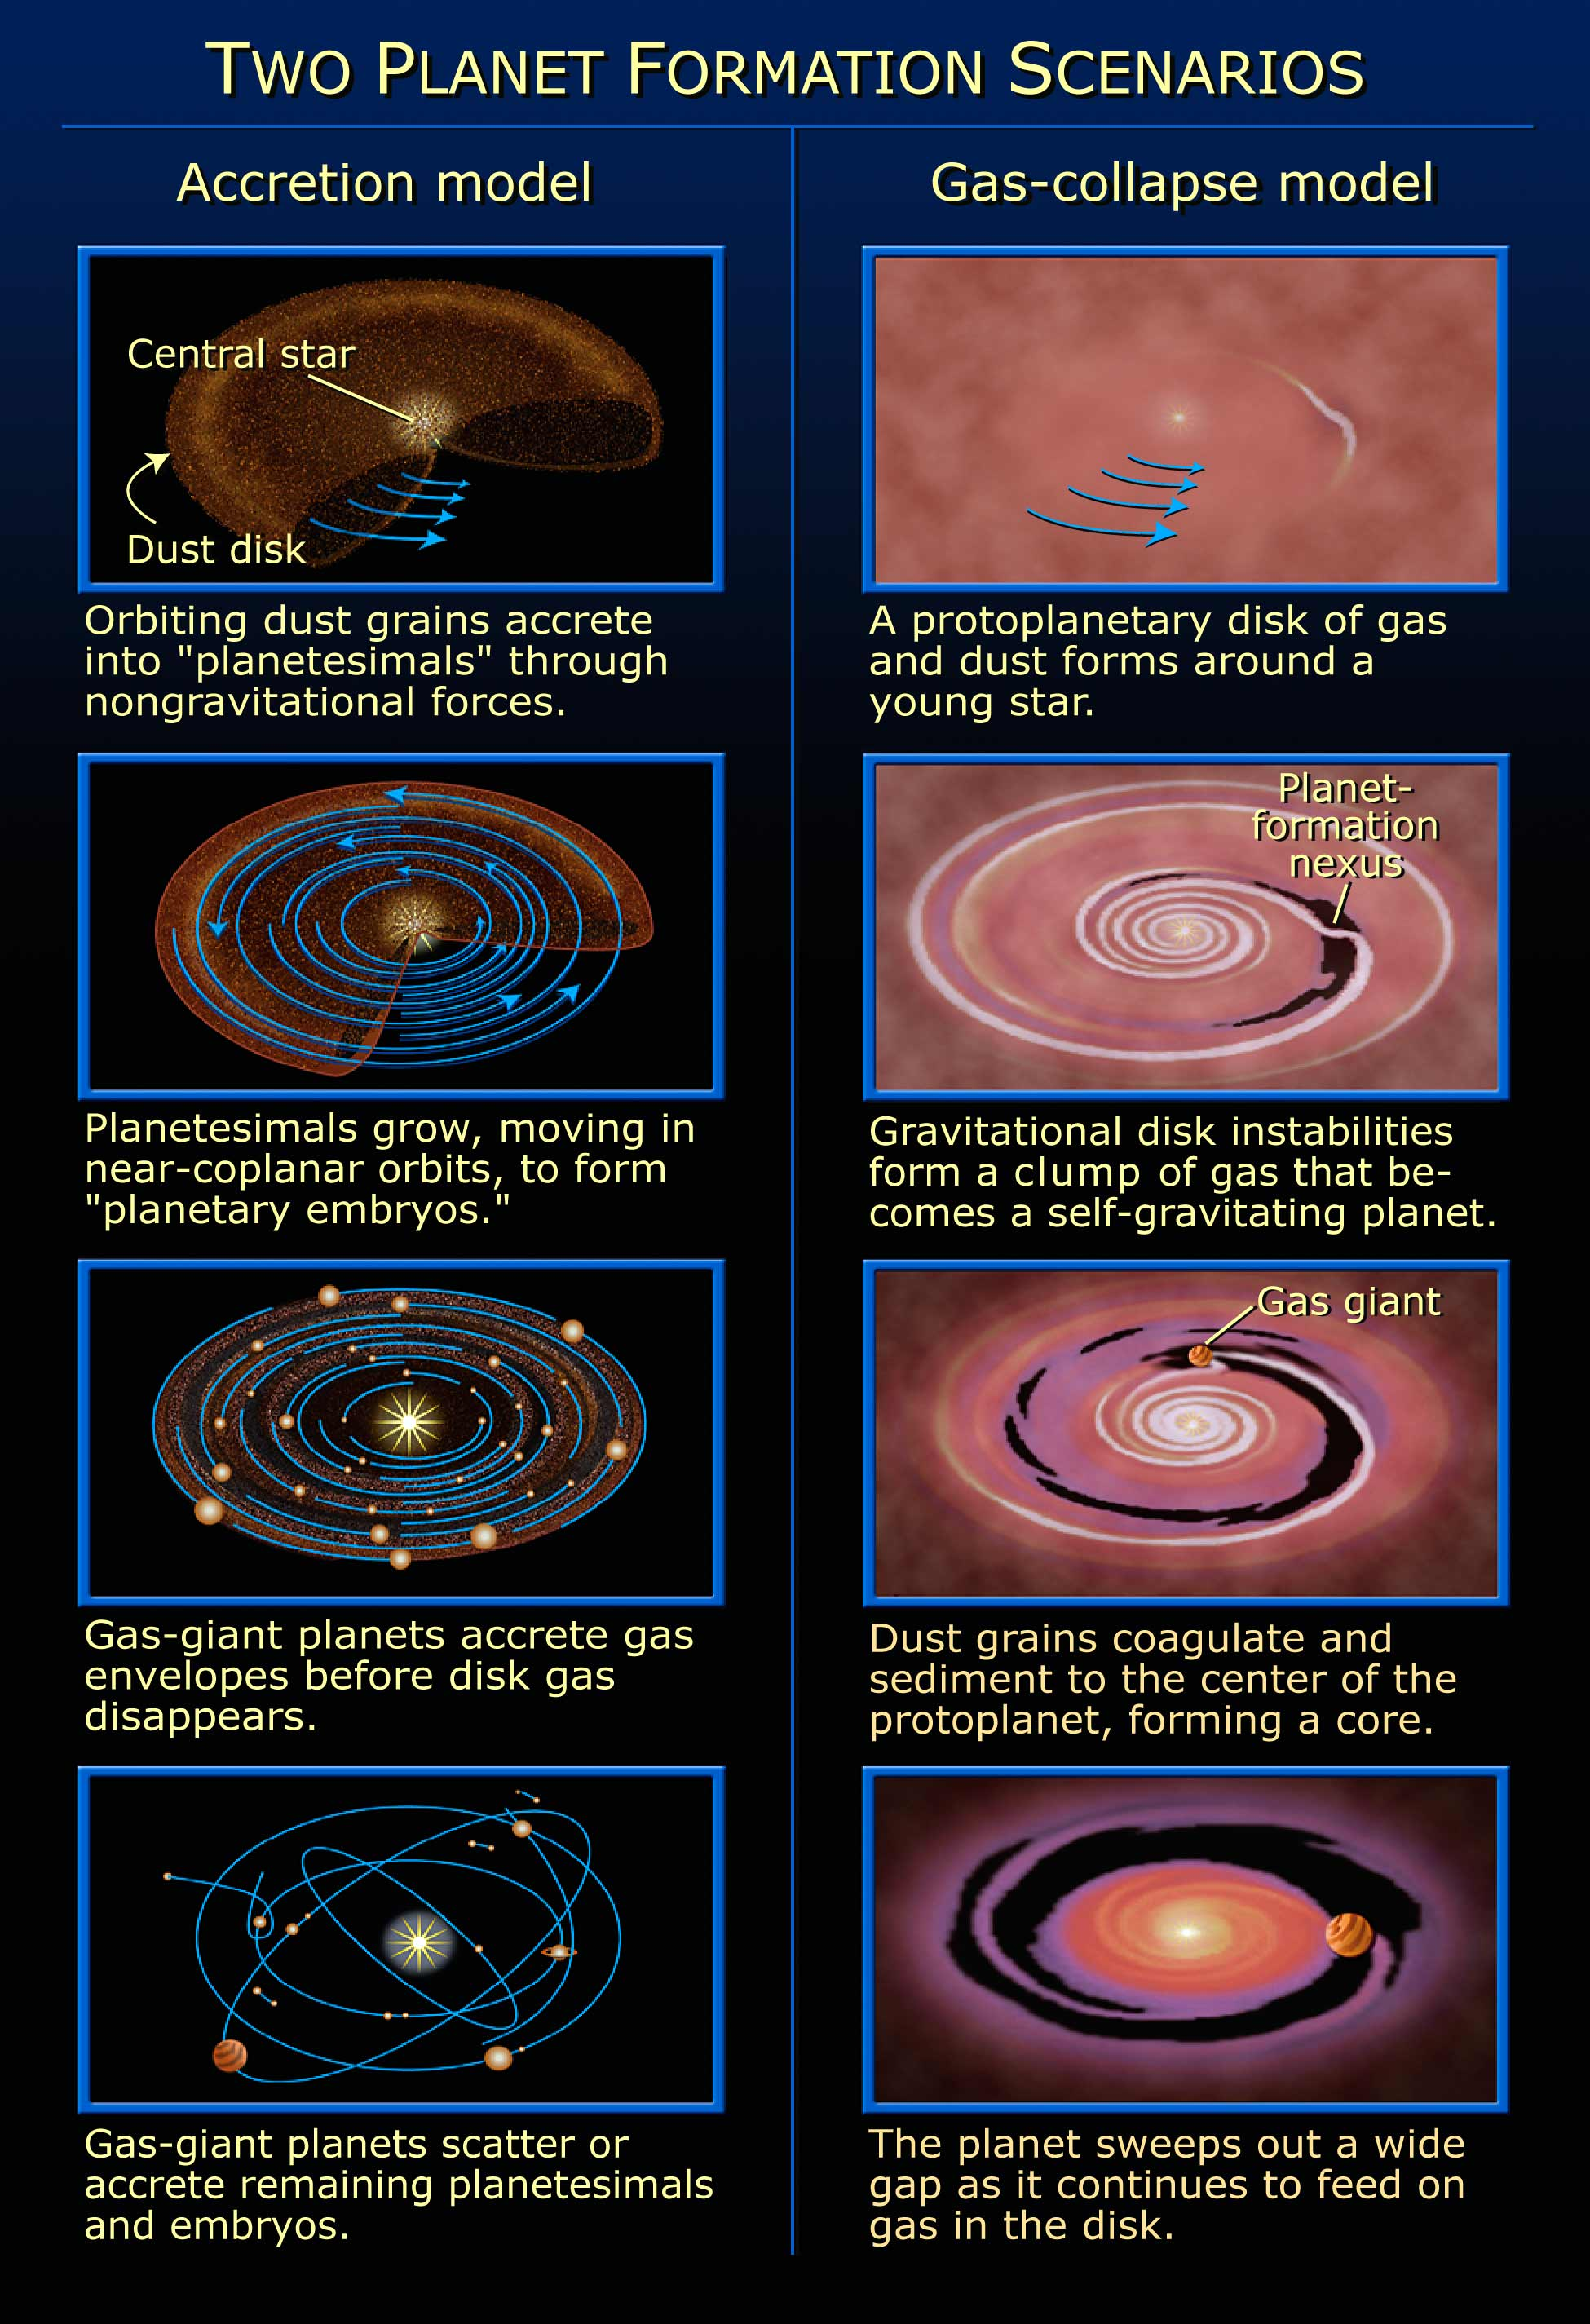

Two planet formation scenarios

Accretion Model and Gas Collapse models: Two different ways of viewing possible planetary formations.

Credit: NASA/ESA and A. Feild (STScI)